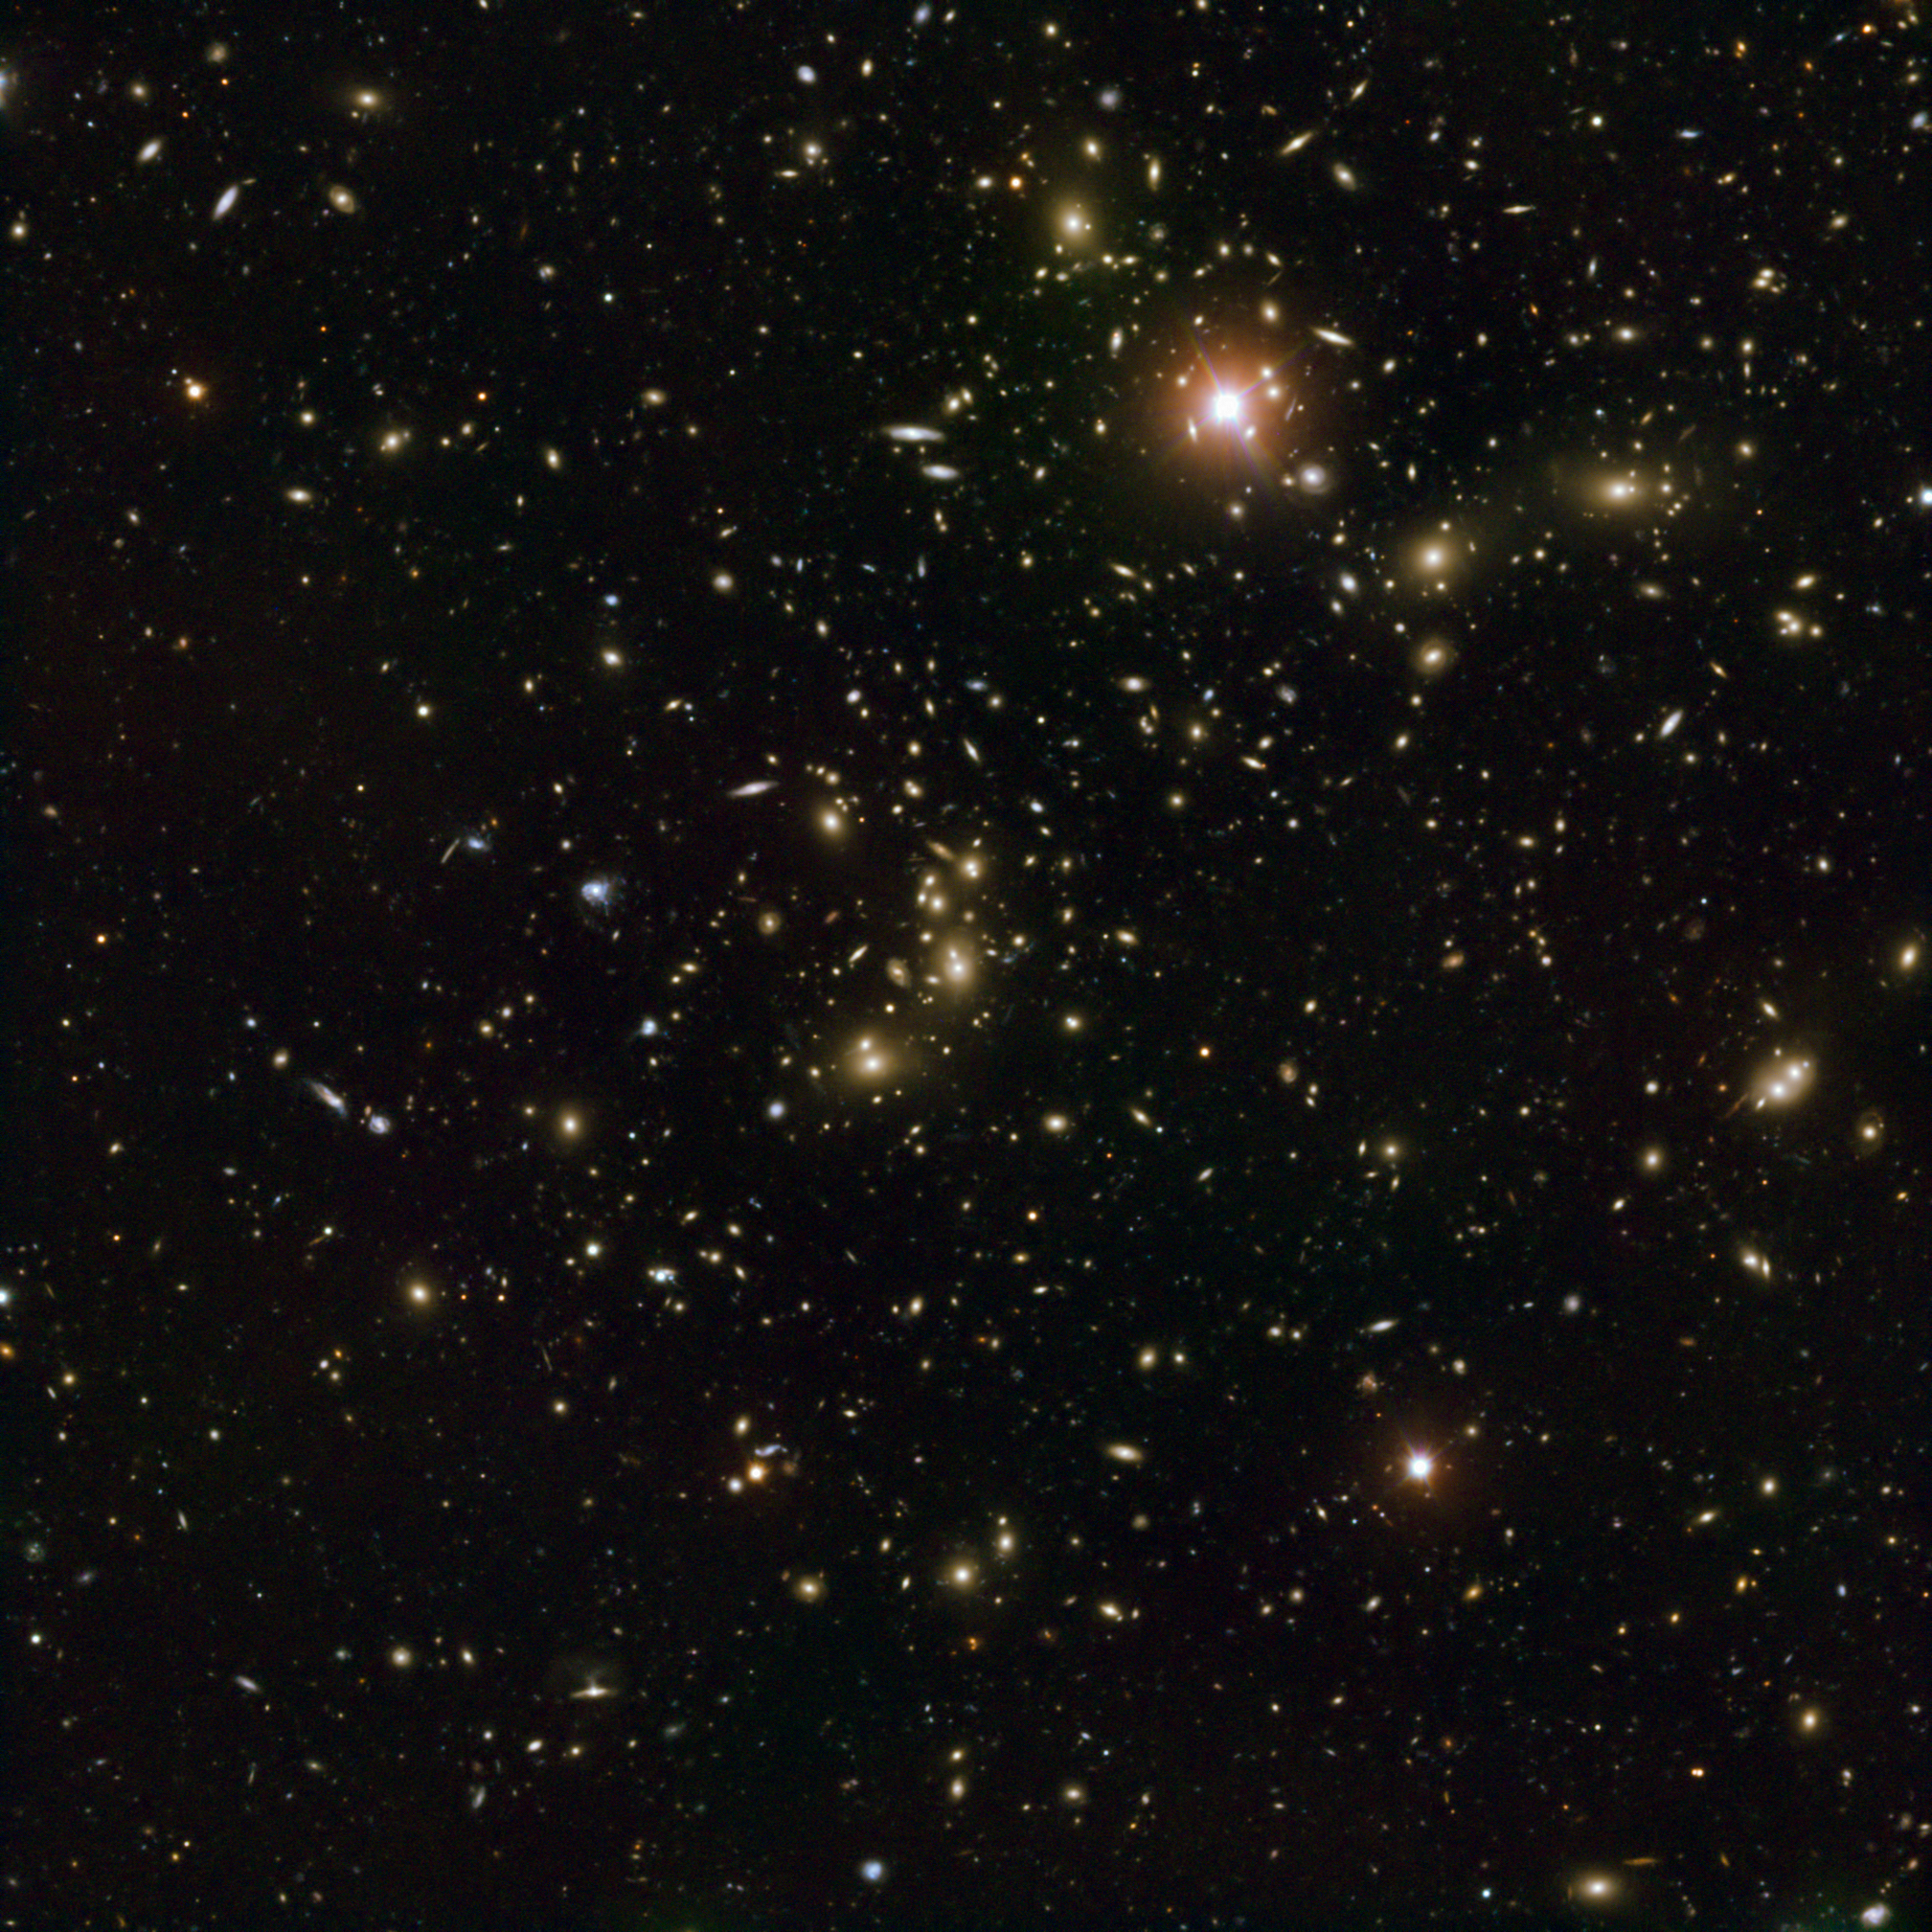

Very Large Telescope view of Abell 2744 — Pandora’s Cluster

This image, made with the European Southern Observatory’s Very Large Telescope (VLT), shows a wide view of merging galaxy cluster Abell 2744, nicknamed Pandora’s Cluster. This remarkable object seems to be the result of the collision of at least four separate galaxy clusters.

Credit: ESO and D. Coe (STScI)/J. Merten (Heidelberg/Bologna)